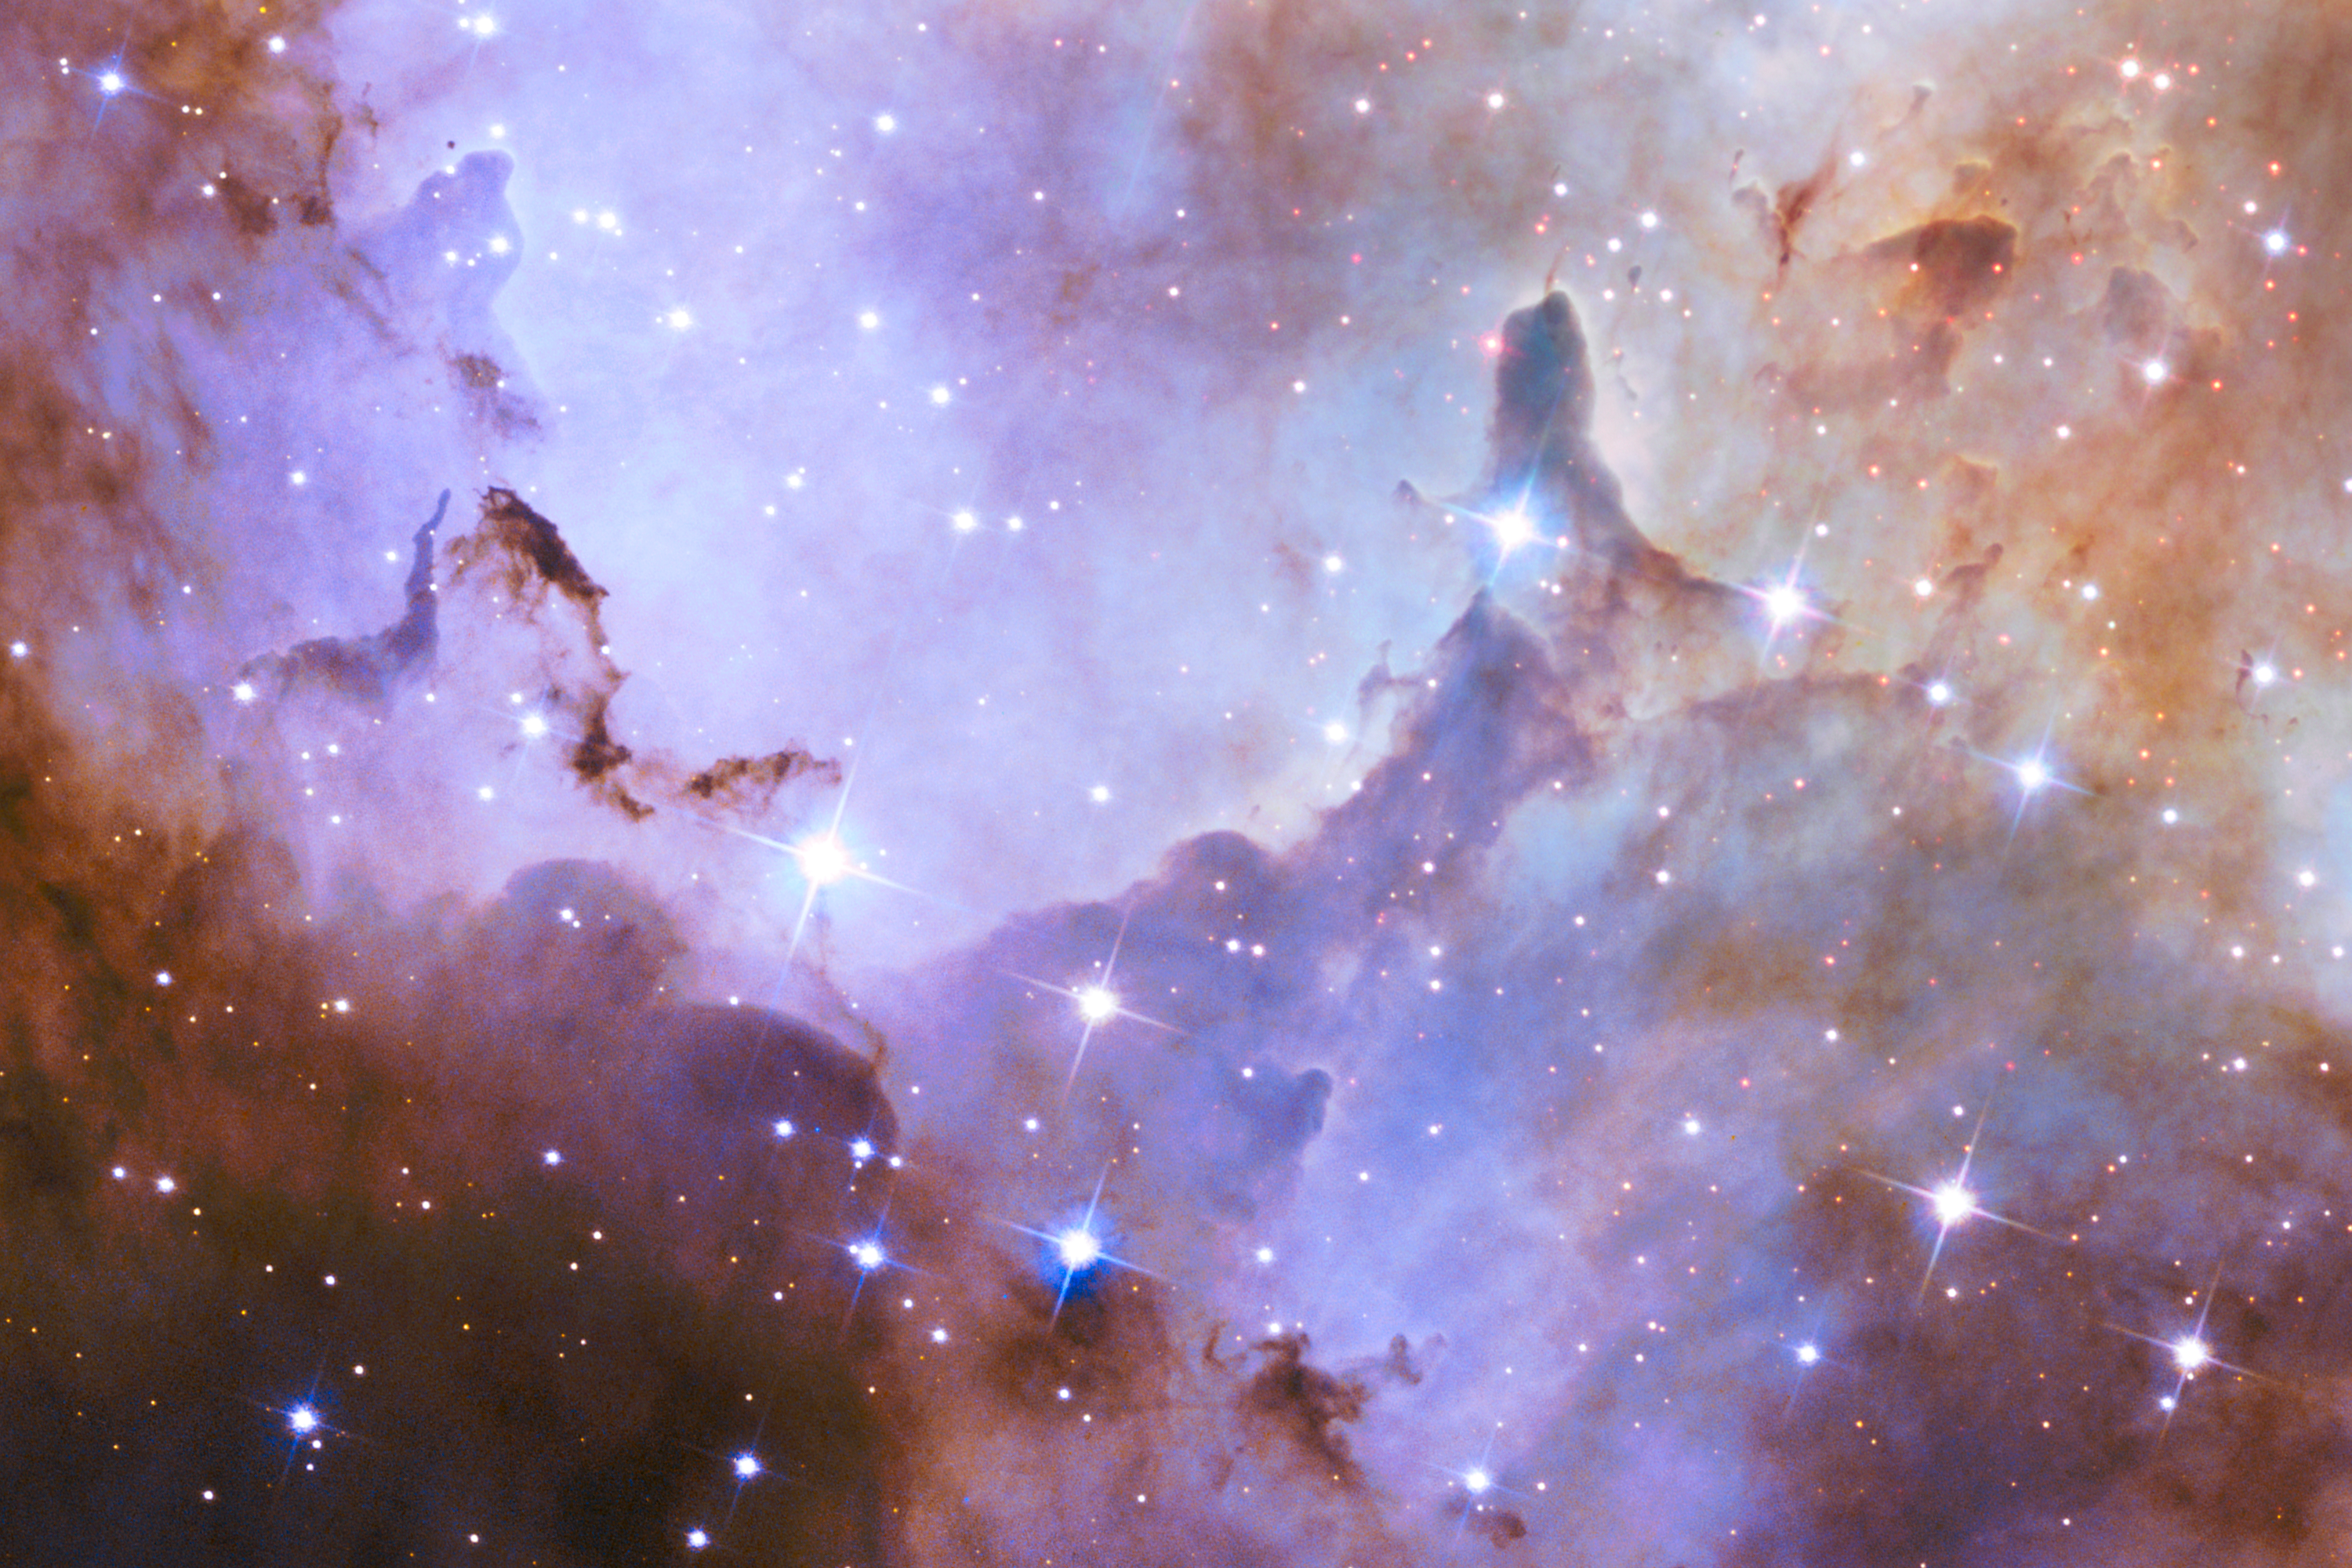

Pillars around Westerlund 2

This image shows an example of the pillars that surround the star cluster Westerlund 2.

These pillars are composed of dense gas and dust are a few light-years tall and point to the central cluster. They are thought to be incubators for new stars. Besides sculpting the gaseous terrain, intense radiation from the most brilliant of the cluster stars is creating a successive generation of baby stars.

This is a section of the new NASA/ESA Hubble Space Telescope image of Westerlund 2 and its surroundings, released to celebrate Hubble’s 25th anniversary.

Credit: NASA, ESA, the Hubble Heritage Team (STScI/AURA), A. Nota (ESA/STScI), and the Westerlund 2 Science Team